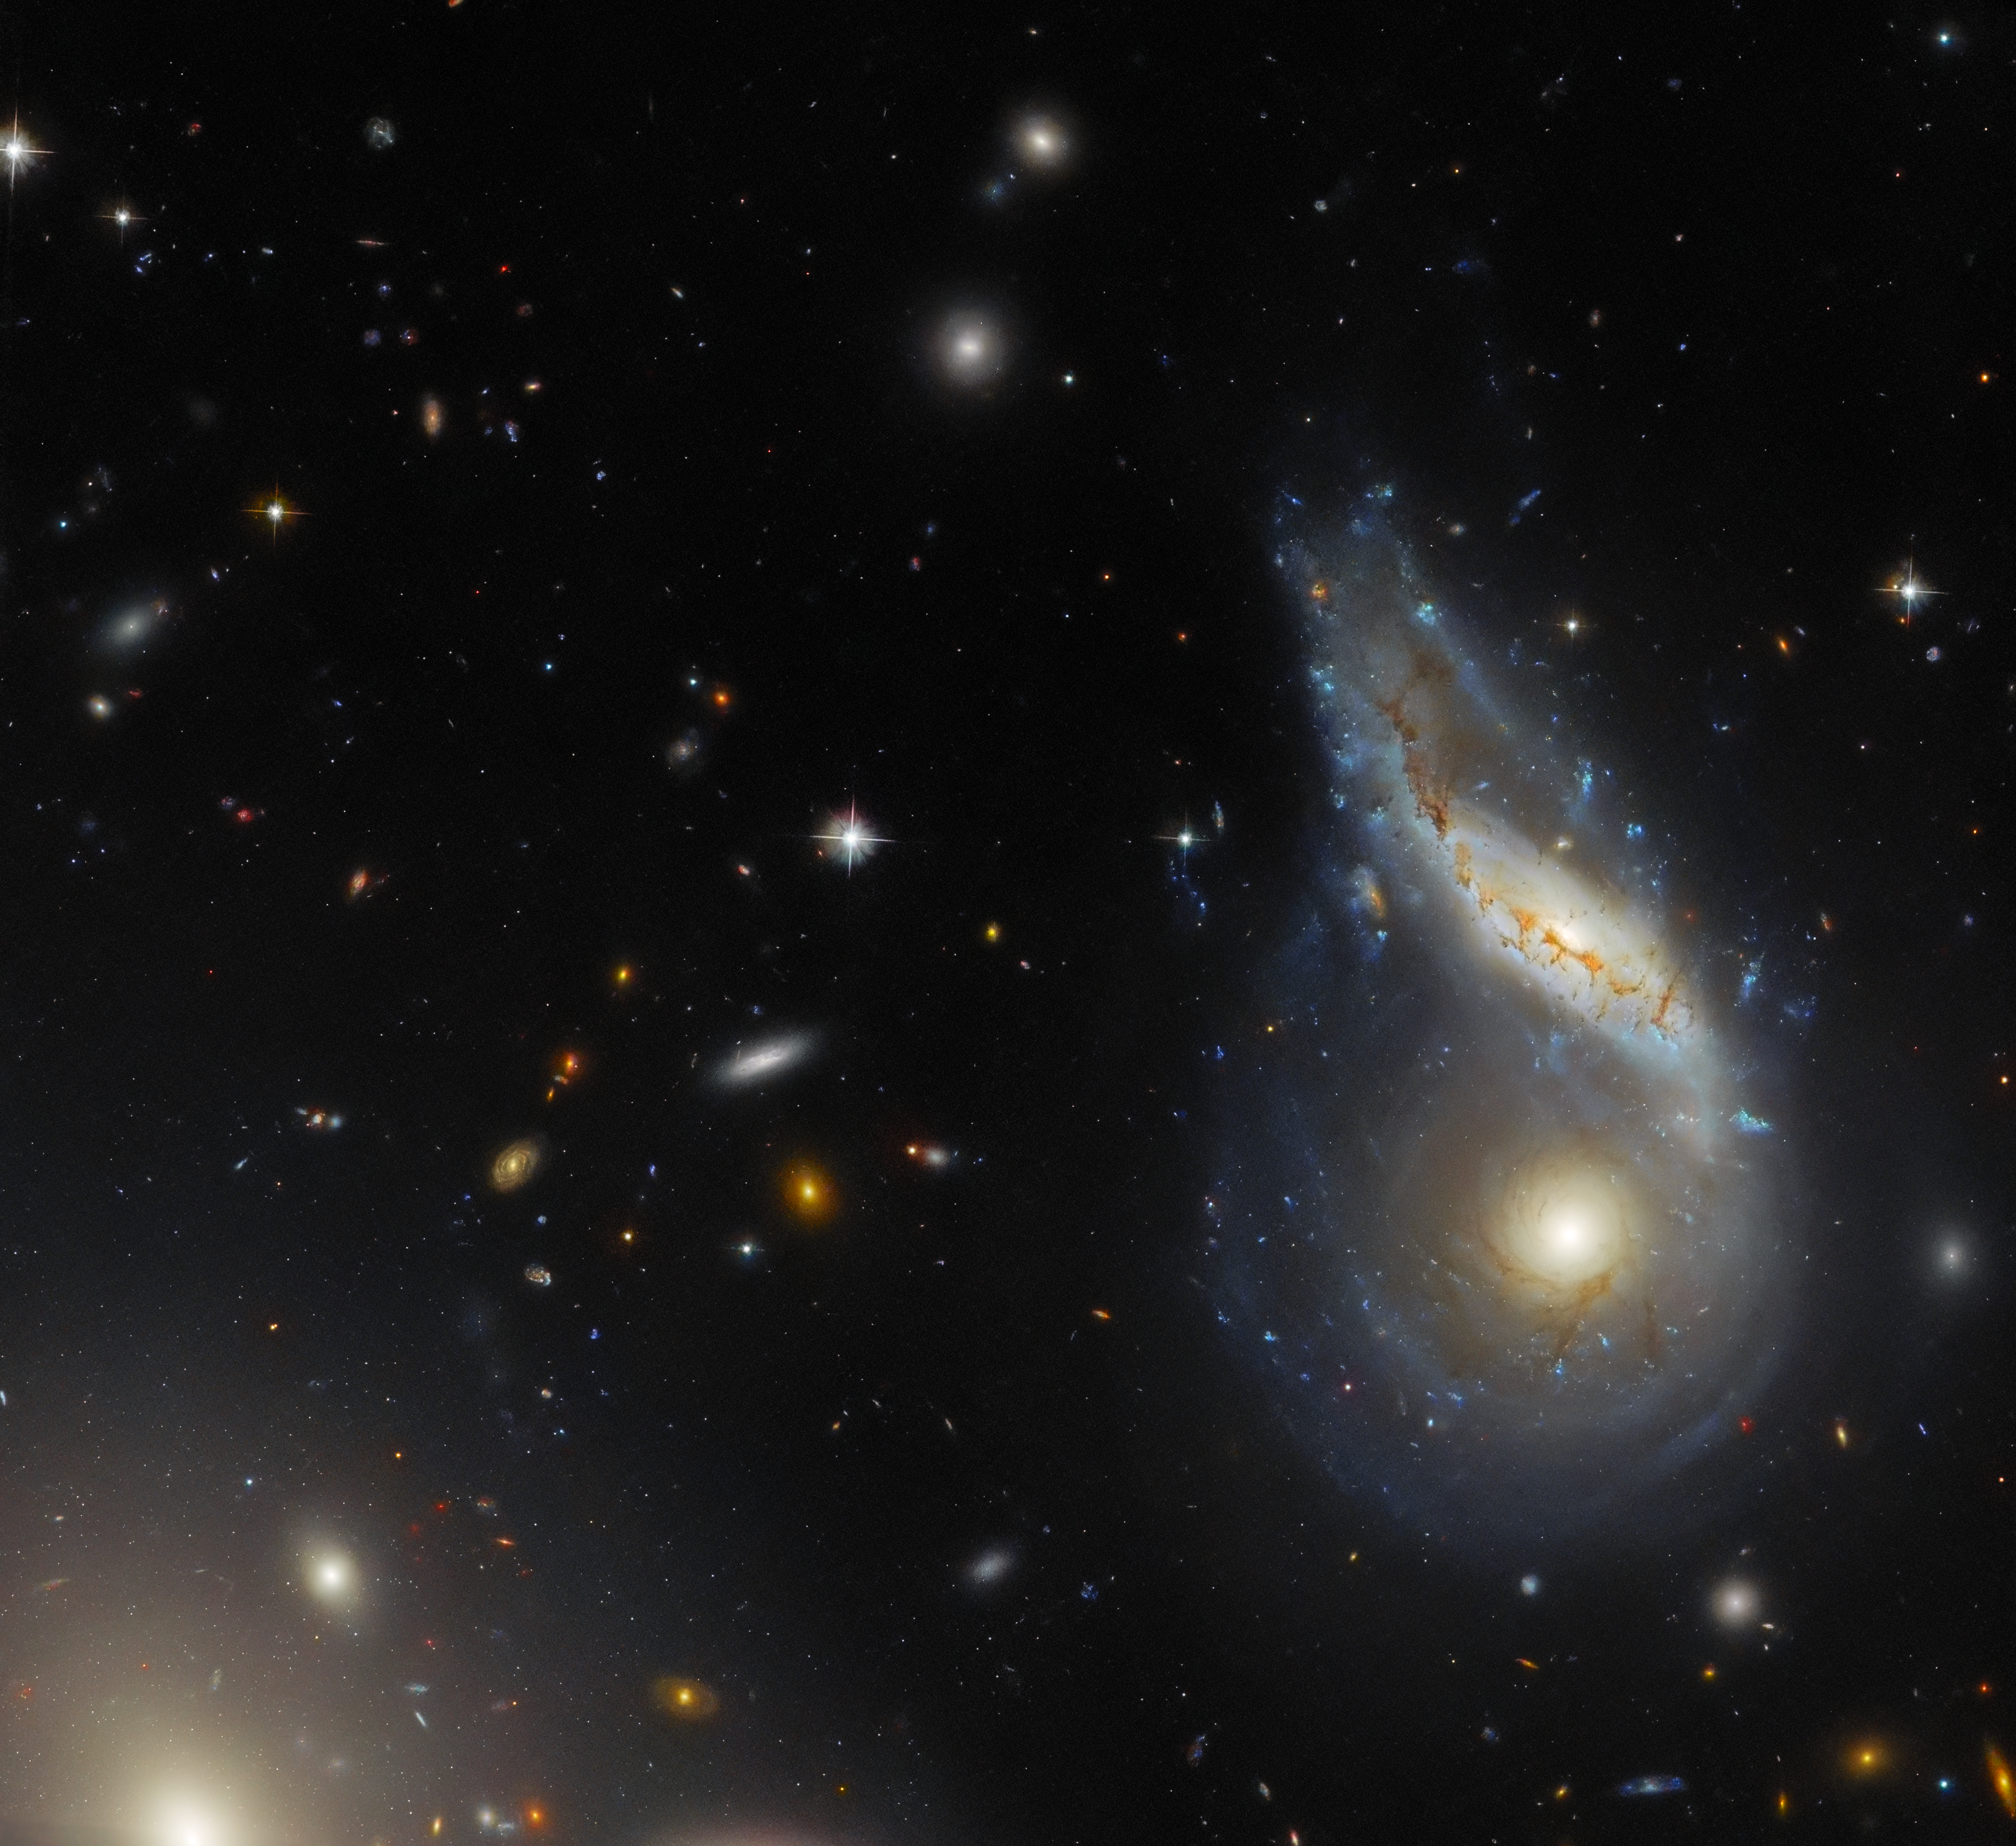

When one plus one (eventually) equals one

This Hubble Picture of the Week features Arp 122, a peculiar galaxy that in fact comprises two galaxies — NGC 6040, the tilted, warped spiral galaxy and LEDA 59642, the round, face-on spiral — that are in the midst of a collision. This dramatic cosmic encounter is located at the very safe distance of roughly 570 million light-years from Earth. Peeking in at the corner is the elliptical galaxy NGC 6041, a central member of the galaxy cluster that Arp 122 resides in, but otherwise not participating in this monster merger.

Galactic collisions and mergers are monumentally energetic and dramatic events, but they take place on a very slow timescale. For example, the Milky Way is on track to collide with its nearest galactic neighbour, the Andromeda Galaxy (M31), but these two galaxies have a good four billion years to go before they actually meet. The process of colliding and merging will not be a quick one either: it might take hundreds of millions of years to unfold. These collisions take so long because of the truly massive distances involved.

Galaxies are composed of stars and their solar systems, dust and gas. In galactic collisions, therefore, these constituent components may experience enormous changes in the gravitational forces acting on them. In time, this completely changes the structure of the two (or more) colliding galaxies, and sometimes ultimately results in a single, merged galaxy. That may well be what results from the collision pictured in this image. Galaxies that result from mergers are thought to have a regular or elliptical structure, as the merging process disrupts more complex structures (such as those observed in spiral galaxies). It would be fascinating to know what Arp 122 will look like once this collision is complete . . . but that will not happen for a long, long time.

Credit: ESA/Hubble & NASA, J. Dalcanton, Dark Energy Survey/DOE/FNAL/DECam/CTIO/NOIRLab/NSF/AURA Acknowledgement: L. Shatz